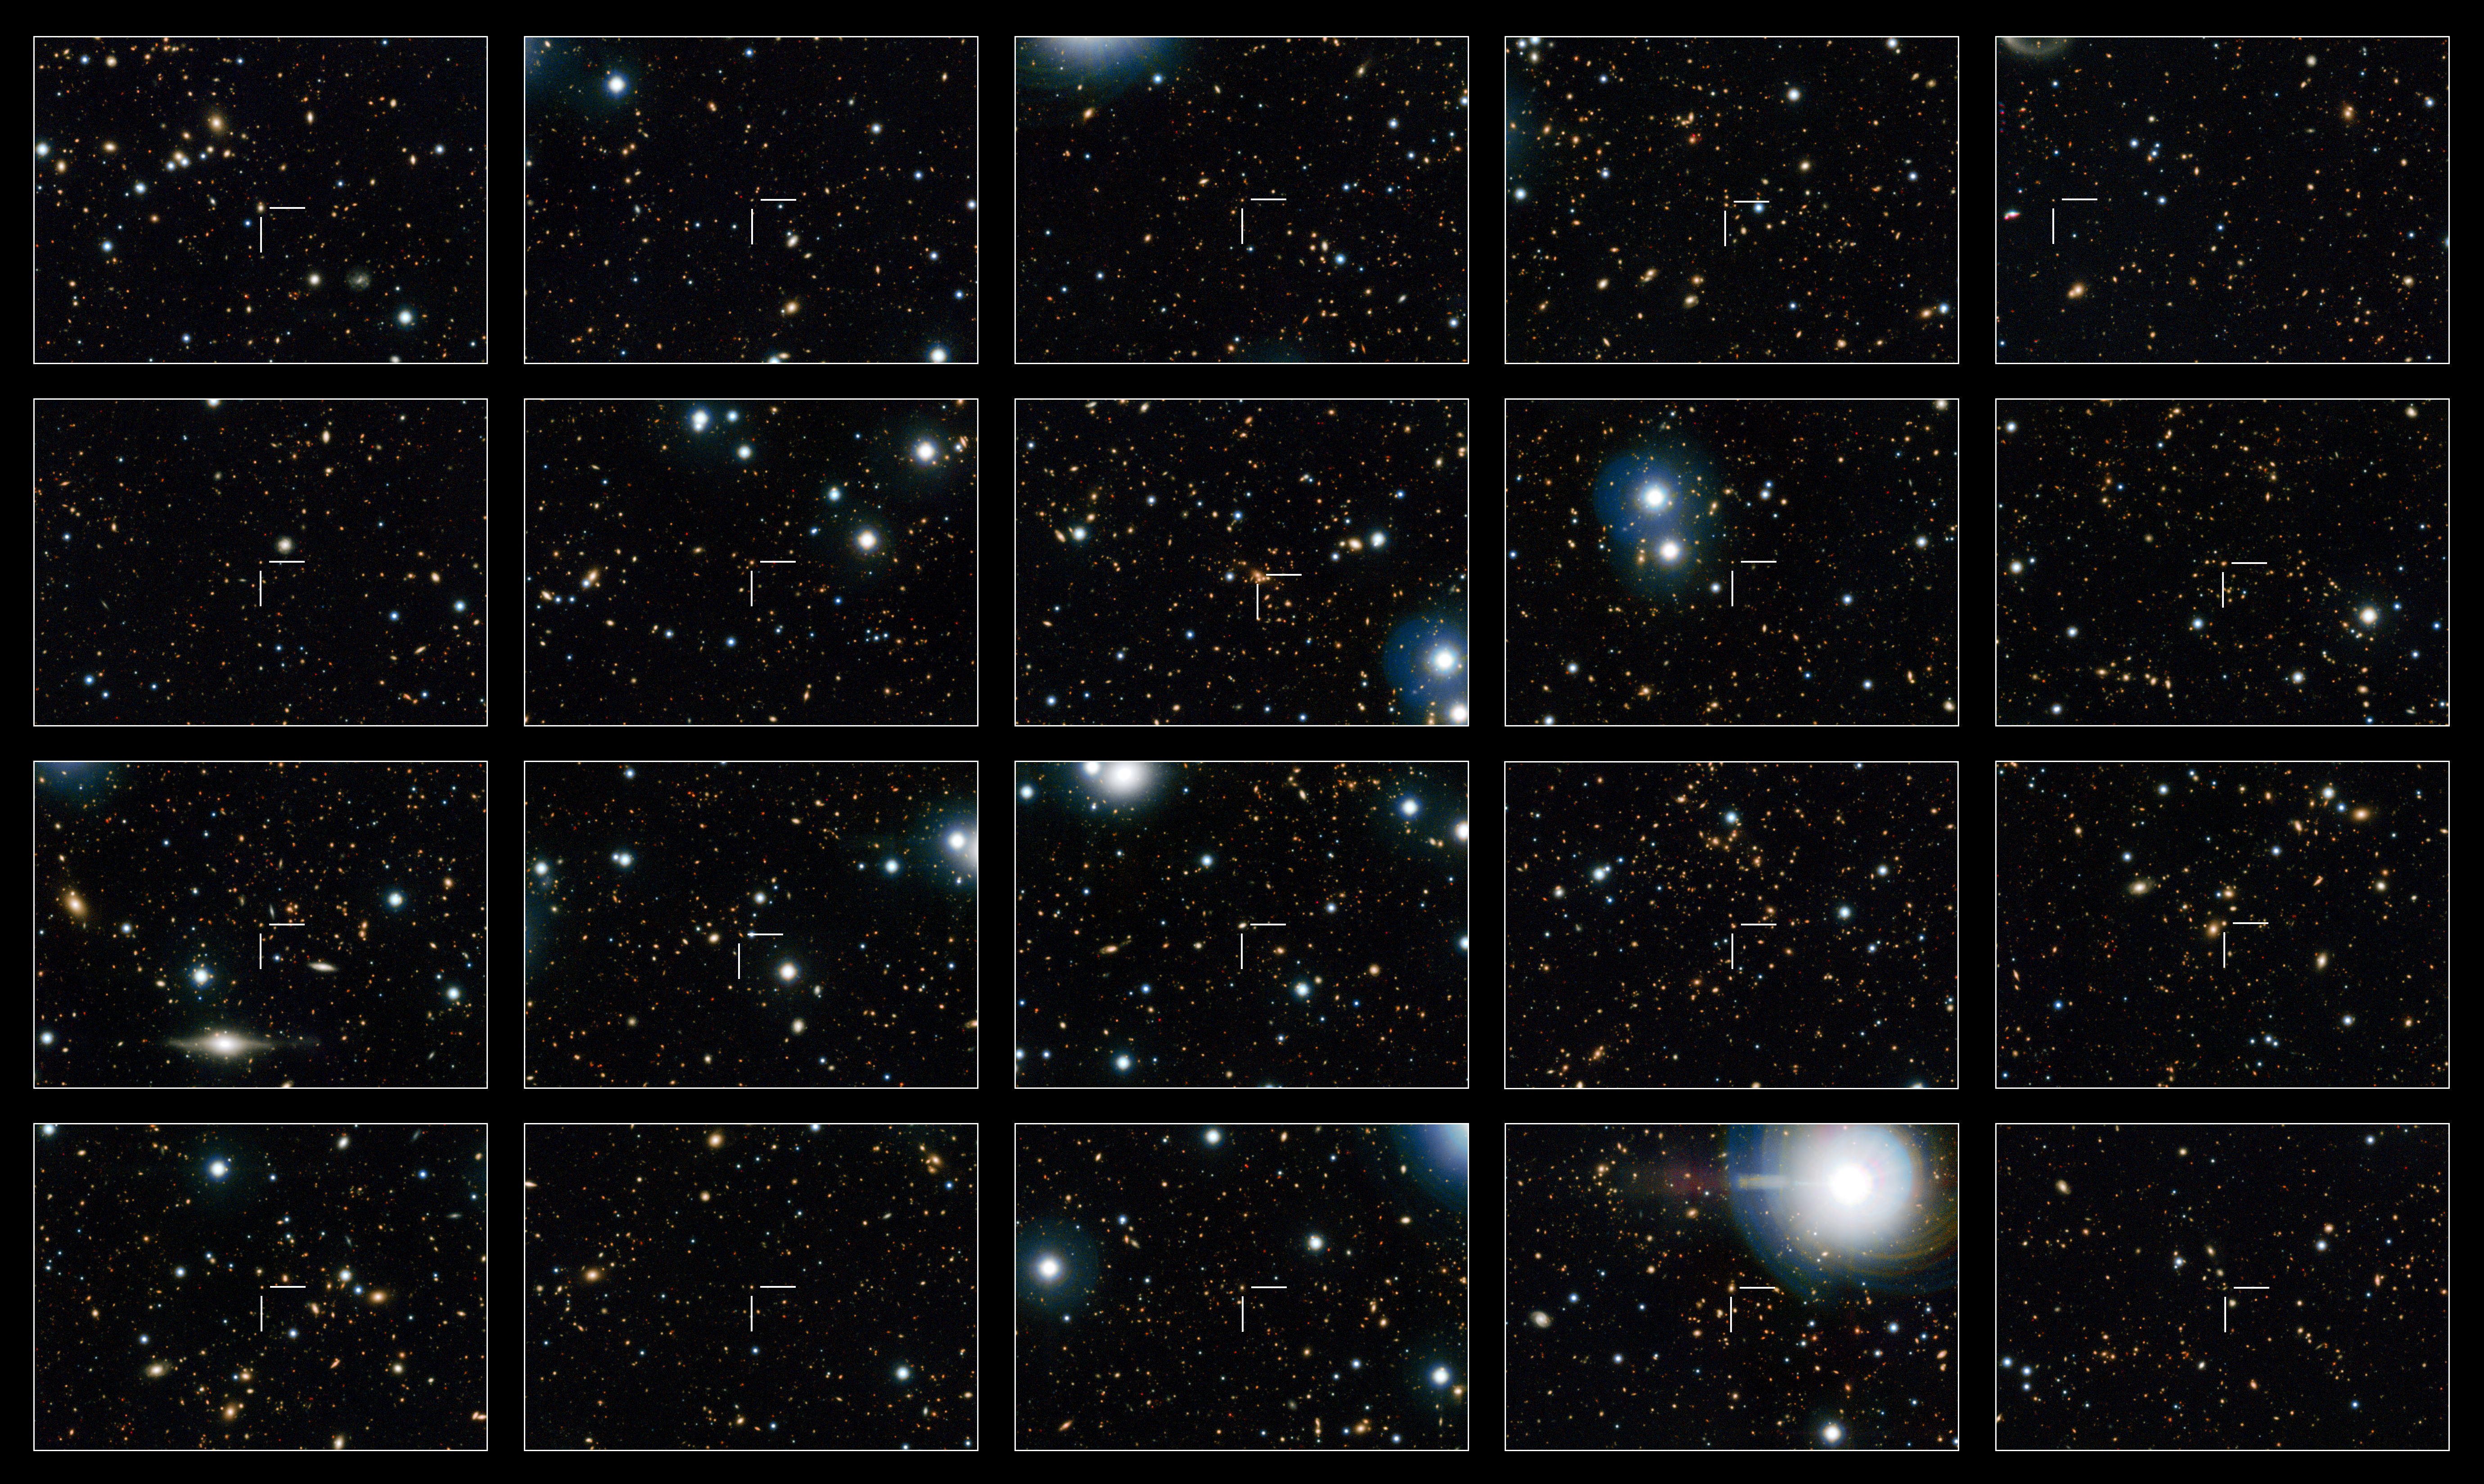

Sample of non-star-forming galaxies from the COSMOS survey

This image shows 20 of the quenched galaxies — galaxies that are no longer forming stars — seen in the Hubble COSMOS observations. Each galaxy is identified by a crosshair at the centre of each frame.

Quenched galaxies in the distant Universe are much smaller than those seen nearby. It was thought that these small galaxies merged with other smaller, gas-free galaxies to grow bigger, but it turns out that larger galaxies were "switching off" at later times and adding their numbers to those of their smaller and older siblings, giving the mistaken impression of individual galaxy growth over time.

Credit: NASA, ESA, M. Carollo (ETH Zurich)